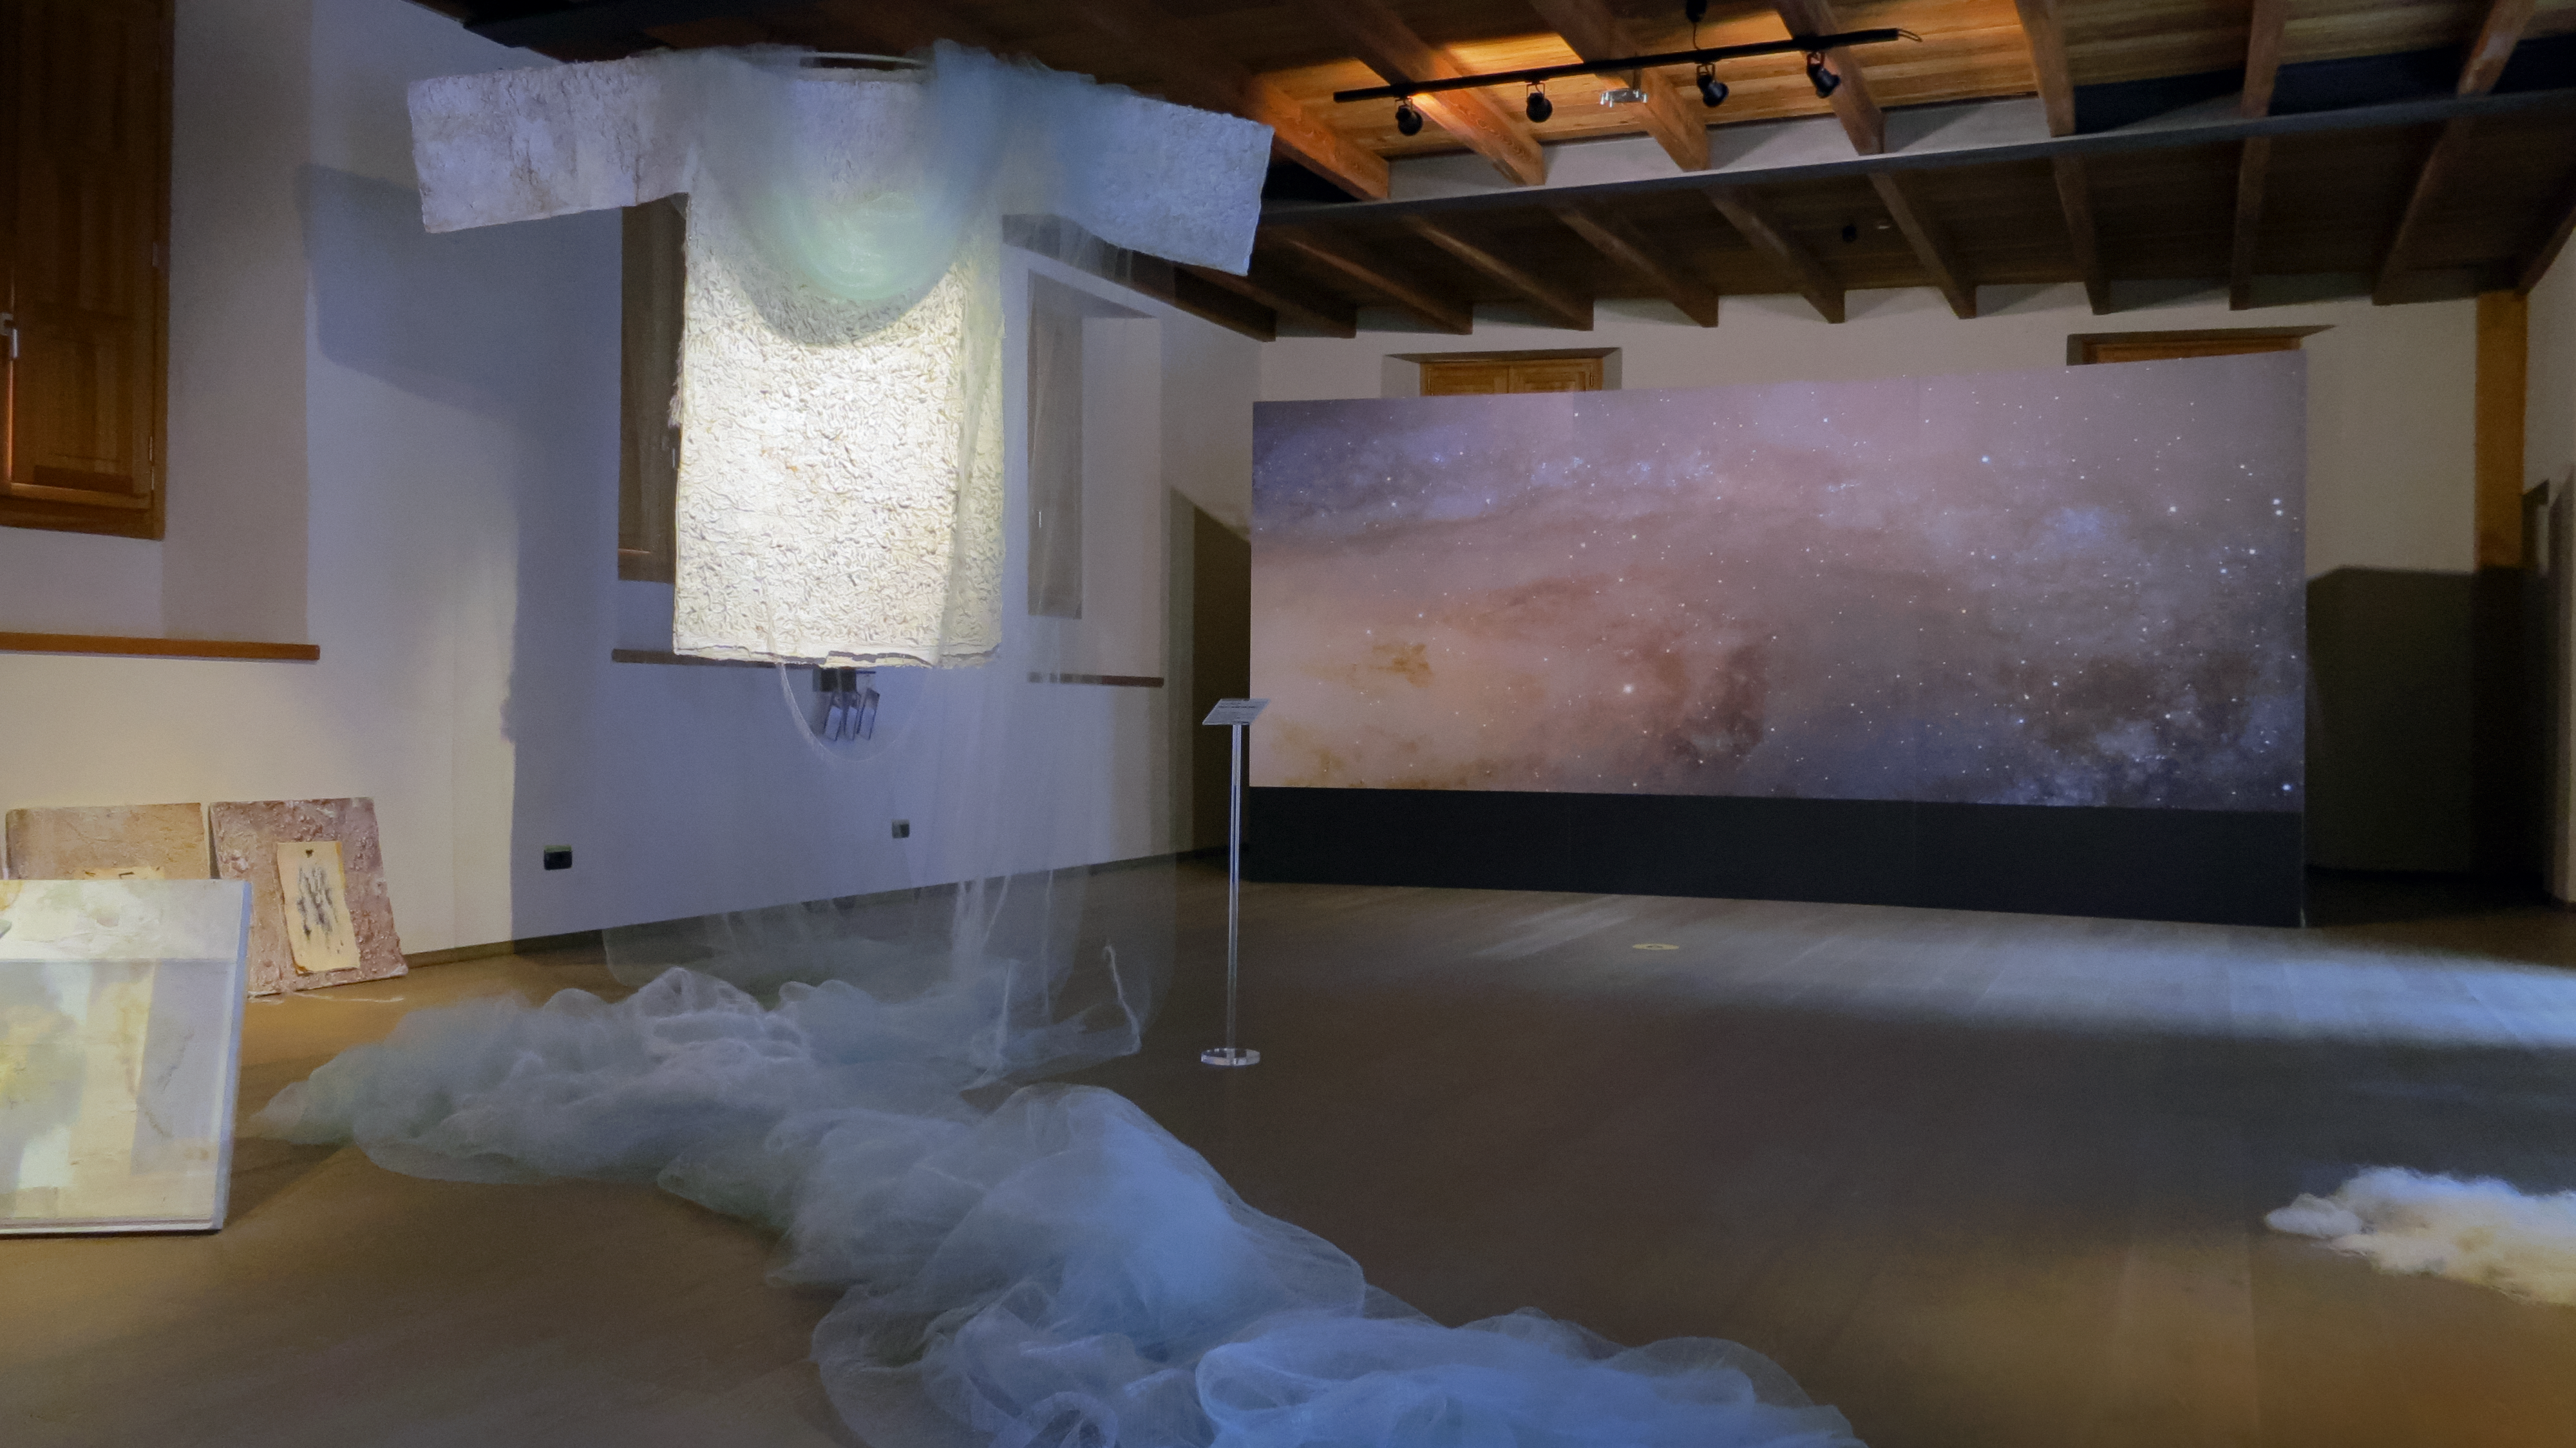

Art installation of Our Place in Space in Chiavenna

Artist Dania Zanotto has taken the variety and abundance of star formation regions and cosmic nebulae and has interpreted them in precious, finely-decorated fabrics of her installation. This installation is part of the Hubble travelling exhibition Our Place in Space. In the background a high resolution image of the Andromeda Galaxy can be seen, which is also part of the exhibition.

Credit: ESA/Hubble, M. Jäger